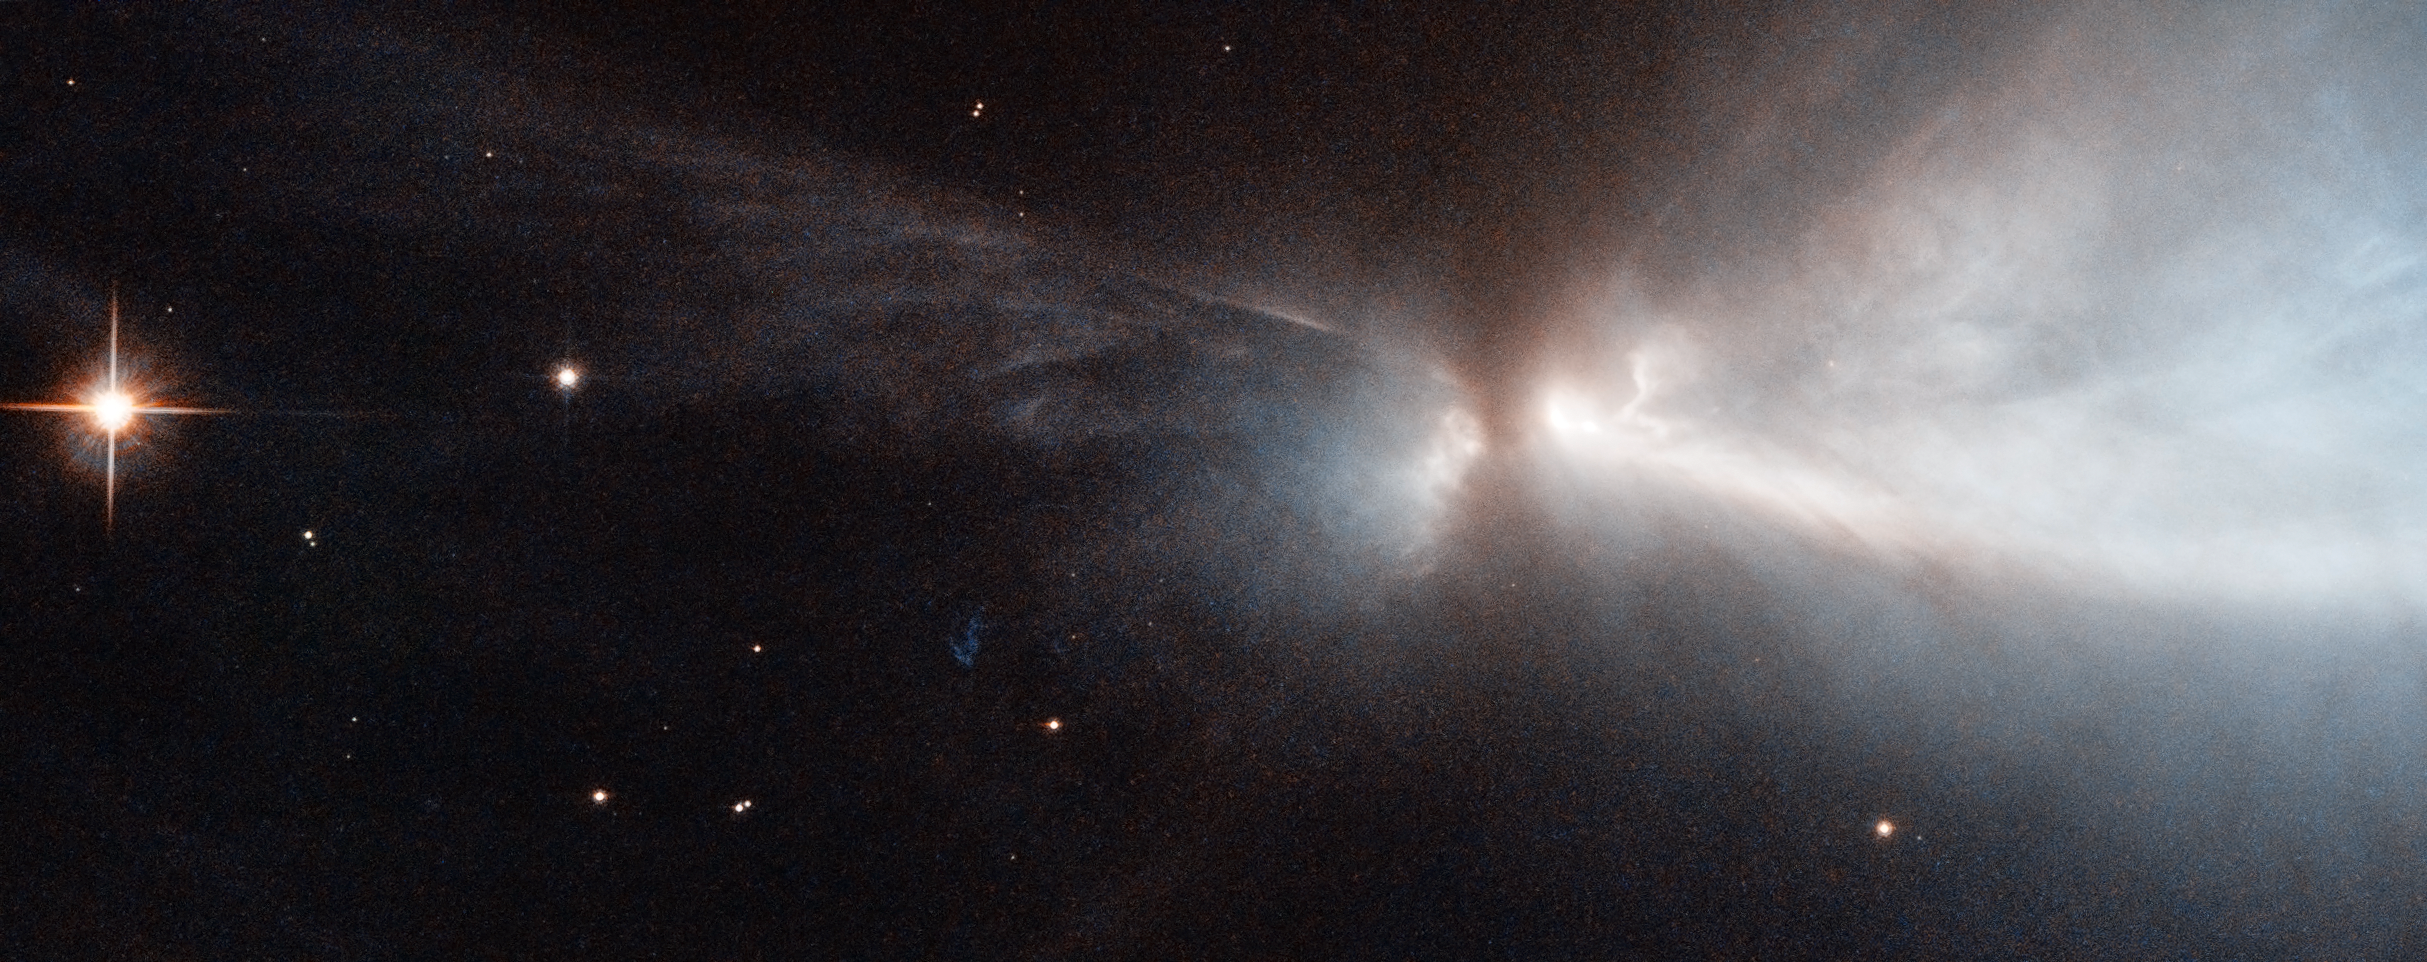

A nursery for unruly young stars

This striking new image, captured by the NASA/ESA Hubble Space Telescope, reveals a star in the process of forming within the Chamaeleon cloud. This young star is throwing off narrow streams of gas from its poles — creating this ethereal object known as HH 909A. These speedy outflows collide with the slower surrounding gas, lighting up the region.

When new stars form, they gather material hungrily from the space around them. A young star will continue to feed its huge appetite until it becomes massive enough to trigger nuclear fusion reactions in its core, which light the star up brightly.

Before this happens, new stars undergo a phase during which they violently throw bursts of material out into space. This material is ejected as narrow jets that streak away into space at breakneck speeds of hundreds of kilometres per second, colliding with nearby gas and dust and lighting up the region. The resulting narrow, patchy regions of faintly glowing nebulosity are known as Herbig-Haro objects. They are very short-lived structures, and can be seen to visibly change and evolve over a matter of years (heic1113) — just the blink of an eye on astronomical timescales.

These structures are very common within star-forming regions like the Orion Nebula, or the Chameleon I molecular cloud — home to the subject of this image. The Chameleon cloud is located in the southern constellation of Chameleon, just over 500 light-years from Earth. Astronomers have found numerous Herbig-Haro objects embedded in this stellar nursery, most of them emanating from stars with masses similar to that of the Sun. A few are thought to be tied to less massive objects such as brown dwarfs, which are "failed" stars that did not hit the critical mass to spark reactions in their centres.

A version of this image was entered into the Hubble's Hidden Treasures image processing competition by contestant Judy Schmidt.

Credit: NASA & ESA. Acknowledgements: Kevin Luhman (Pennsylvania State University), and Judy Schmidt